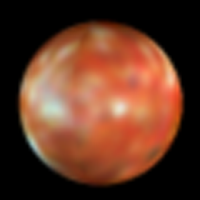

Changes on the Surface of Io

This picture is taken in March 1994, when Io was still 'smooth'. Compared with the newer image (search for opo9537 for comparison or opo9537b for the newer image) one can see that Io is still undergoing some geologic activity.

Credit: J. Spencer (Lowell Observatory), and NASA/ESA